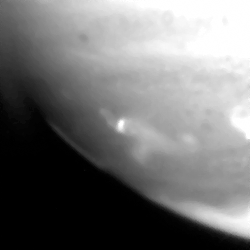

Fragment a impact site

This image shows the fragment A impact site.

Credit: Hubble Space Telescope Comet Team, and NASA/ESA